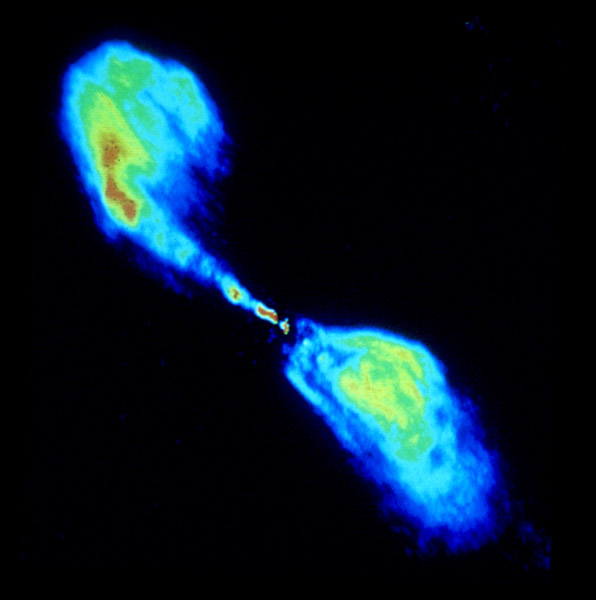

VLA 6cm (radio) 1988

The elliptical galaxy Centaurus A, also known as NGC 5128, is well known for its dramatic dusty lanes of dark material and its central supermassive black hole, which ejects material with a relativistic speed from the nucelus of the galaxy.

This image shows, that, whereas the main part of the galaxy is invisible, these jets emmit radiation in radio wavelengths. By taking radio observations of the jets separated by a decade, astronomers have determined that the inner parts of the jets are moving at about one half of the speed of light.

Credit: Jack O. Burns (University of Missouri) & David Clarke (St. Mary's University,Nova Scotia)